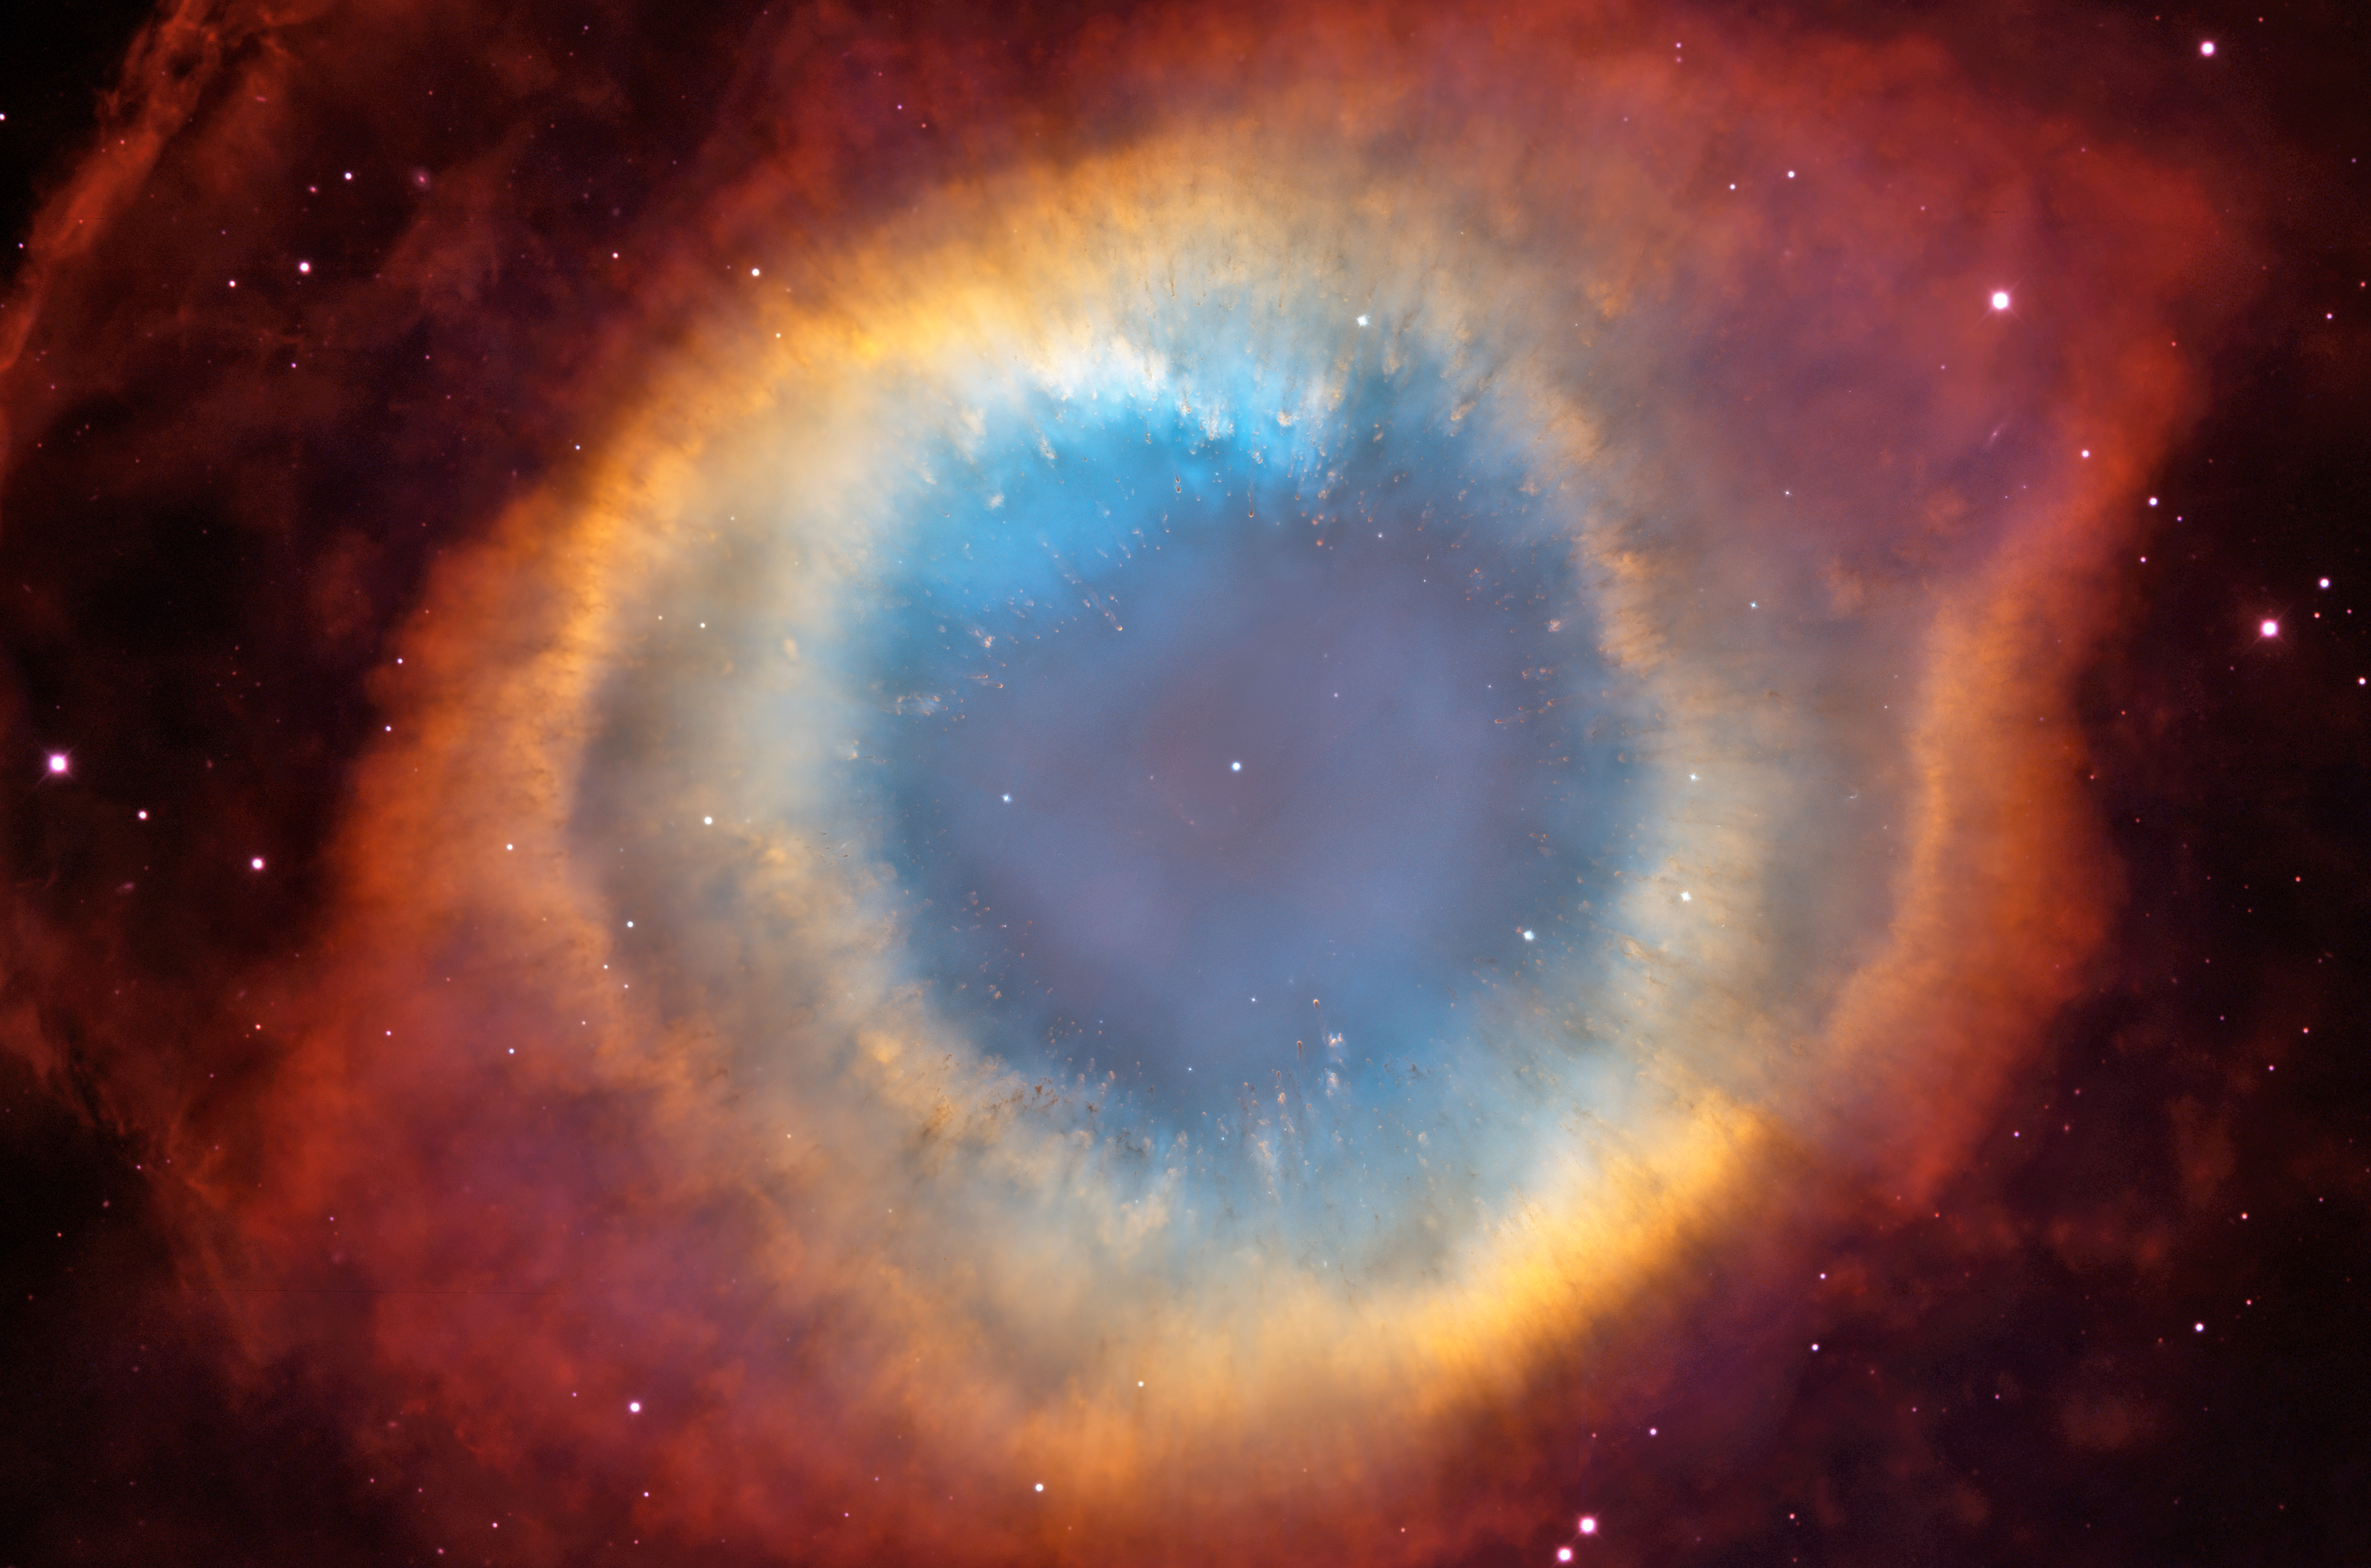

Helix Nebula: HST/CTIO Image

Looks can be deceiving, especially when it comes to celestial objects like galaxies and nebulas. These objects are so far away that astronomers cannot see their three-dimensional structure. The Helix Nebula, for example, resembles a doughnut in colorful images. Earlier images of this complex object, the gaseous envelope ejected by a dying, sun-like star did not allow astronomers to precisely interpret its structure. One possible interpretation was that the Helix's form resembled a snake-like coil. Observations from several observatories, including NASA's Hubble Space Telescope, established that the Helix's structure is even more perplexing. Their evidence suggests that the Helix consists of two gaseous disks nearly perpendicular to each other.

Credit: NASA, ESA, C.R. O'Dell (Vanderbilt University), and M. Meixner, P. McCullough, and G. Bacon ( Space Telescope Science Institute)